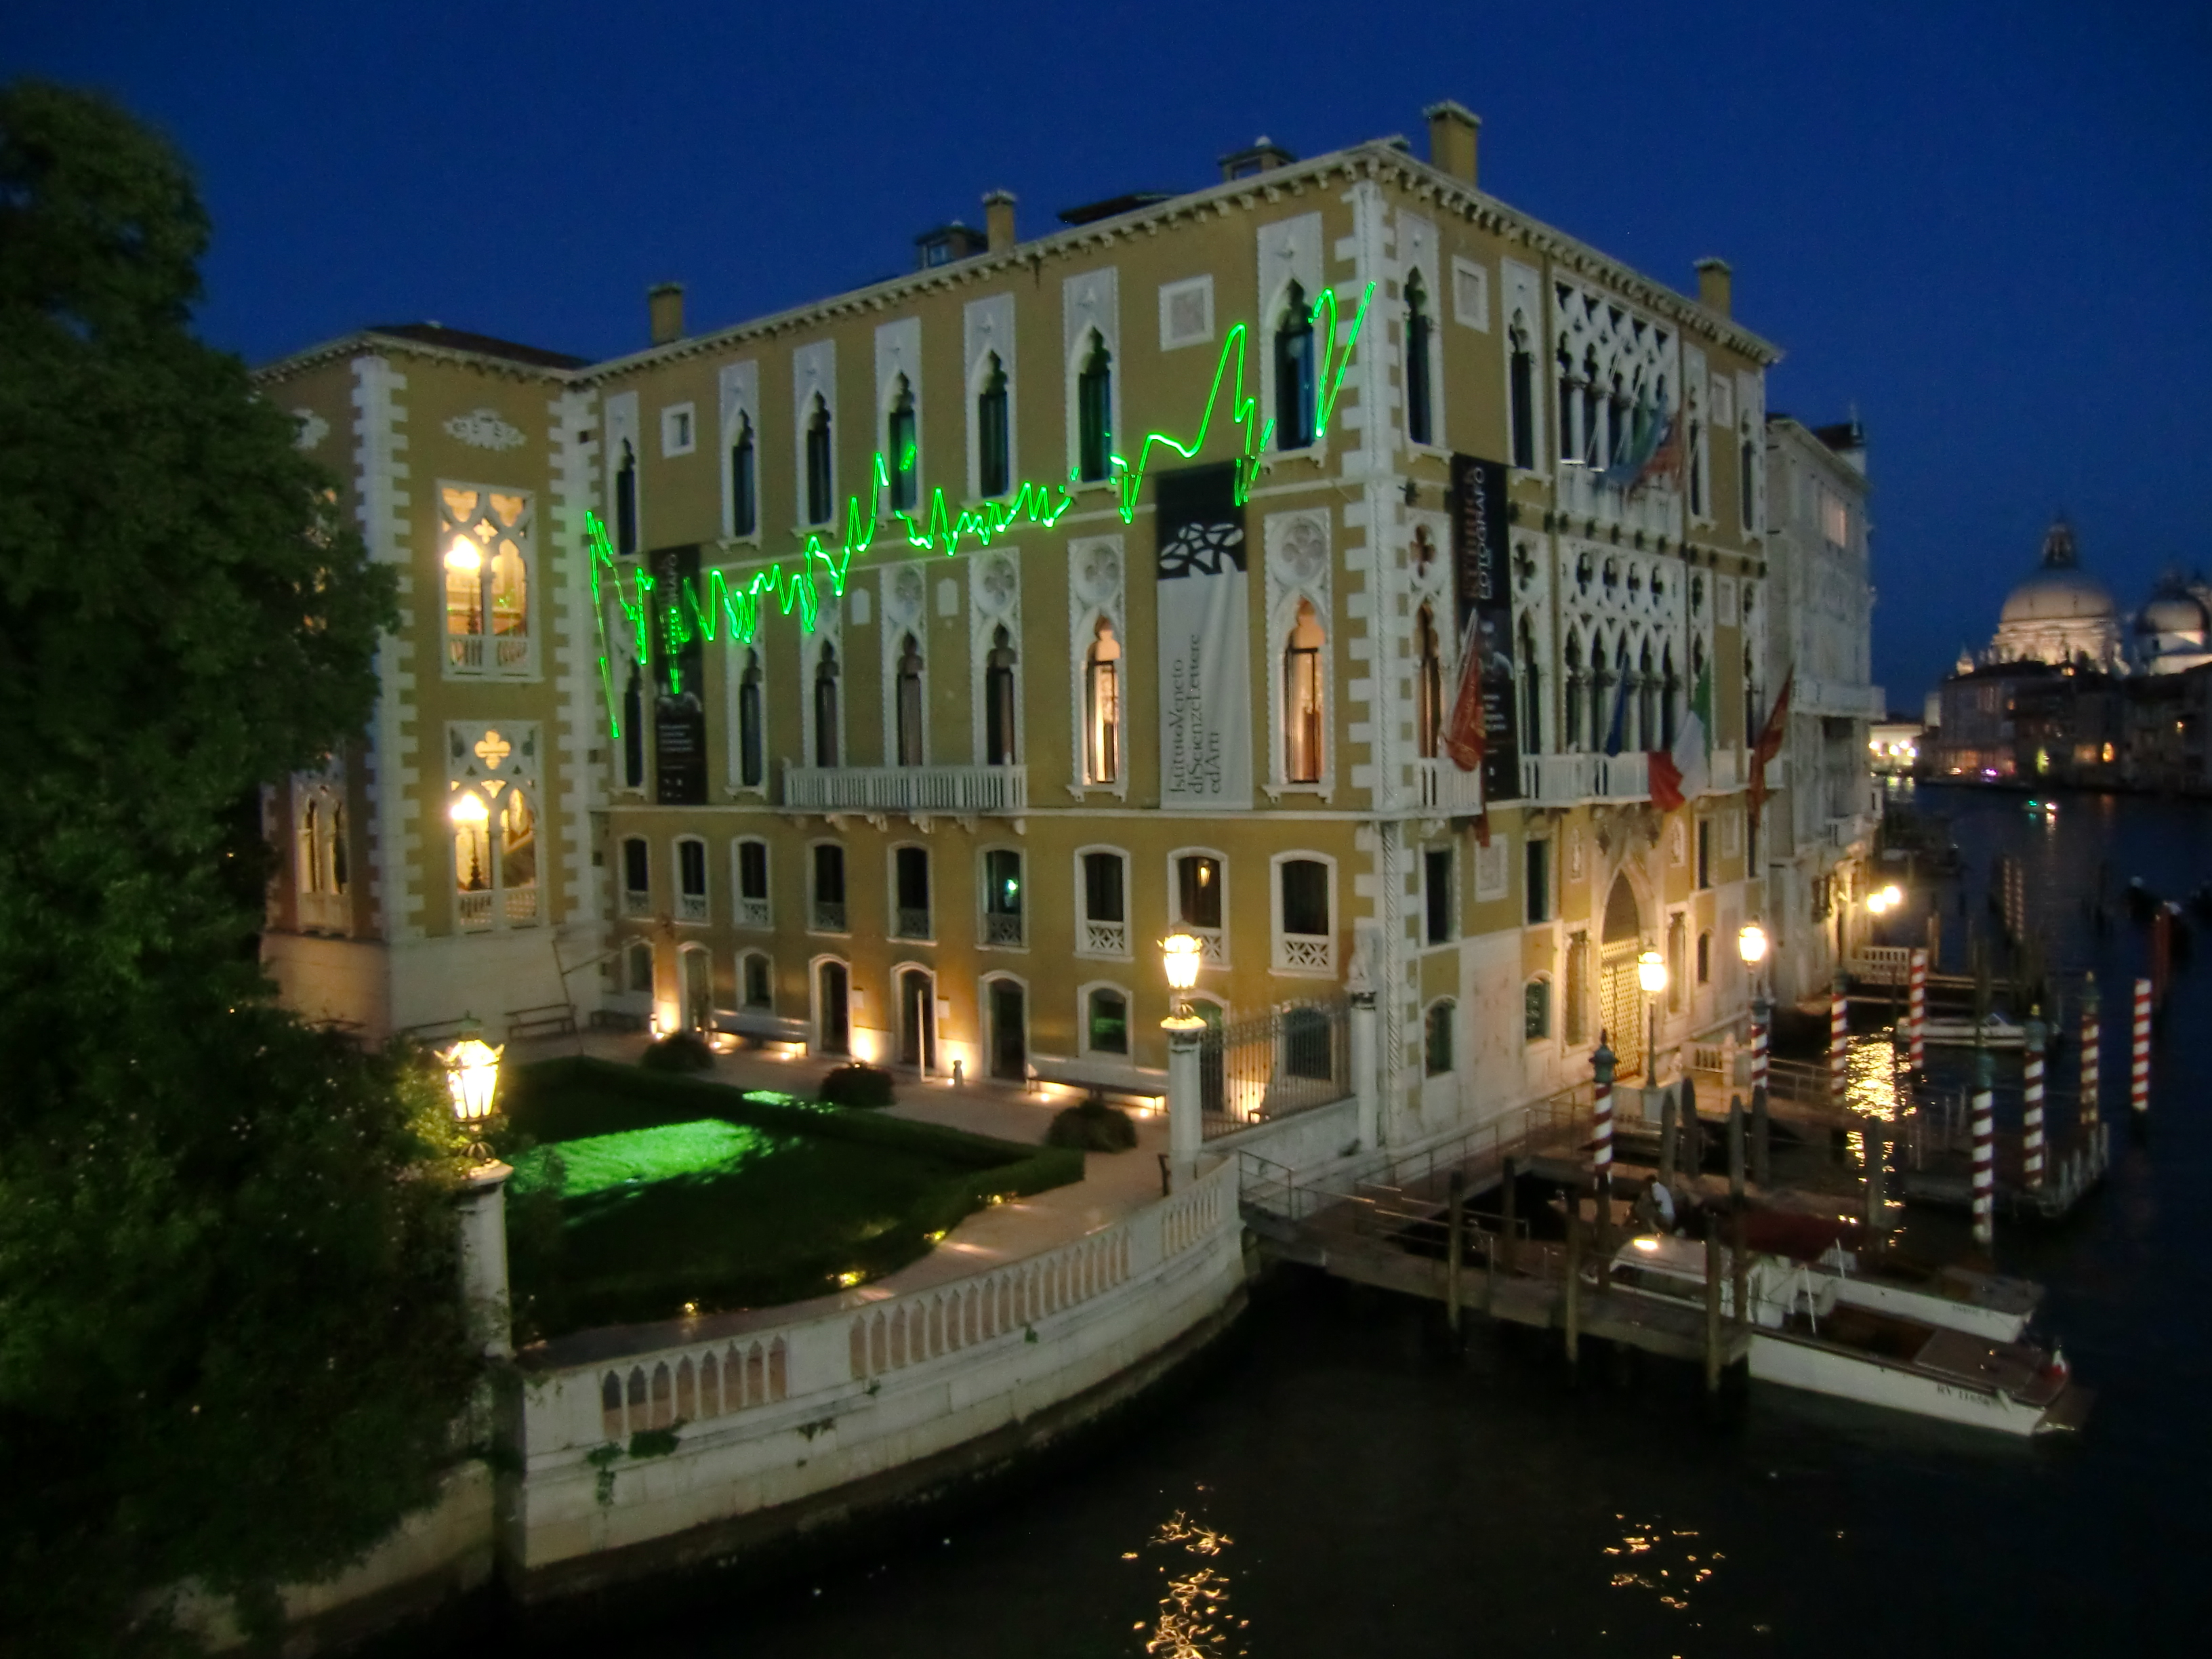

From the distant past

A breathtaking laser installation by artist Tim Otto Roth on Venice’s Palazzo Franchetti. While the scanning green laser might appear abstract, it is in fact based on Hubble observations of distant galaxies.

Credit: Tim Otto Roth